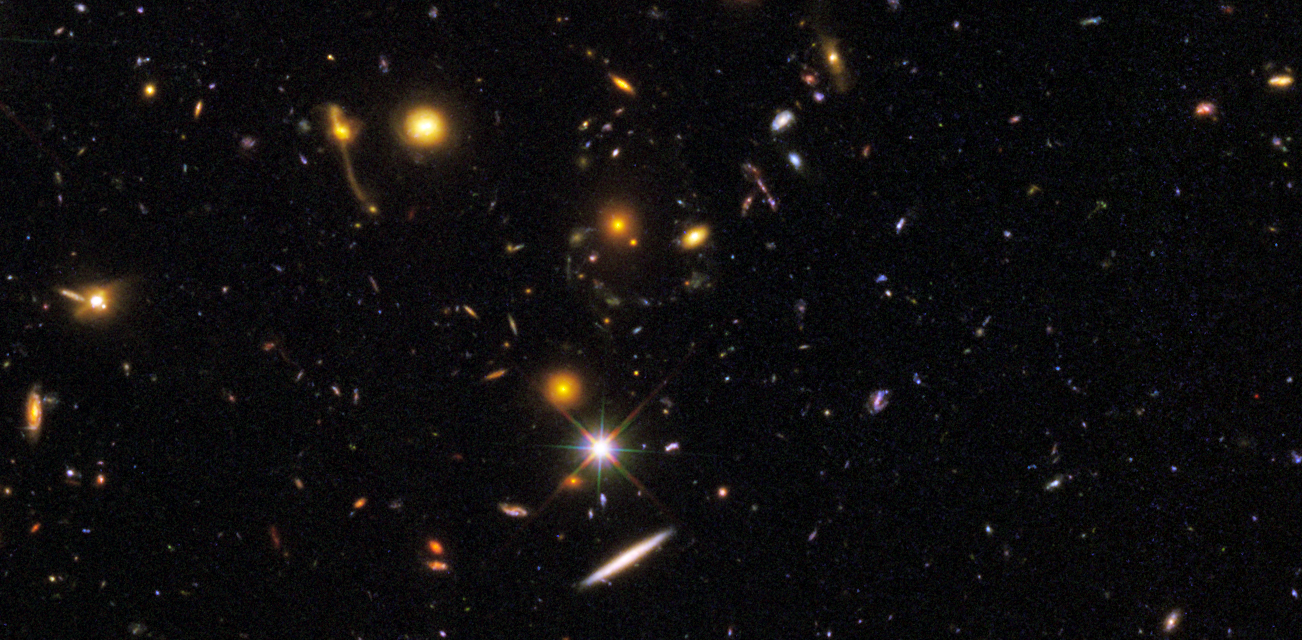

GOODS South WFC3 ERS Details 3

This image, taken by NASA's Hubble Space Telescope, was made from mosaics taken in September and October 2009 with the newly installed Wide Field Camera 3 (WFC3) and in 2004 with the Advanced Camera for Surveys (ACS).

Credit: NASA, ESA, R. Windhorst, S. Cohen, M. Mechtley, and M. Rutkowski (Arizona State University, Tempe), R. O'Connell (University of Virginia), P. McCarthy (Carnegie Observatories), N. Hathi (University of California, Riverside), R. Ryan (University of California, Davis), H. Yan (Ohio State University) and A. Koekemoer (Space Telescope Science Institute)